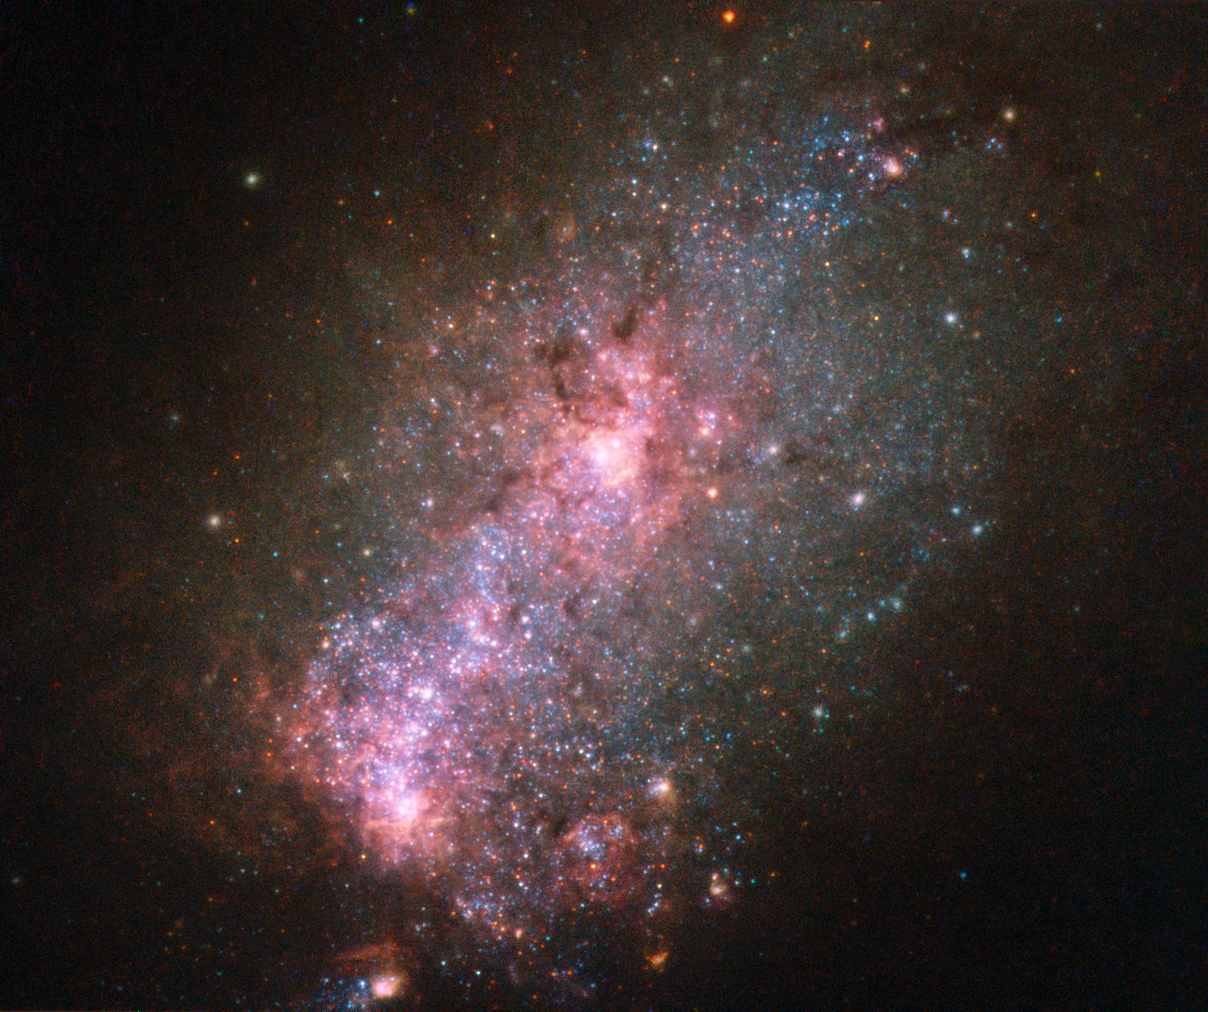

A galaxy fit to burst

This NASA/ESA Hubble Space Telescope image reveals the vibrant core of the galaxy NGC 3125. Discovered by John Herschel in 1835, NGC 3125 is a great example of a starburst galaxy — a galaxy in which unusually high numbers of new stars are forming, springing to life within intensely hot clouds of gas.

Located approximately 50 million light-years away in the constellation of Antlia (The Air Pump), NGC 3125 is similar to, but unfathomably brighter and more energetic than, one of the Magellanic Clouds. Spanning 15 000 light-years, the galaxy displays massive and violent bursts of star formation, as shown by the hot, young, and blue stars scattered throughout the galaxy’s rose-tinted core. Some of these clumps of stars are notable — one of the most extreme Wolf–Rayet star clusters in the local Universe, NGC 3125-A1, resides within NGC 3125.

Despite their appearance, the fuzzy white blobs dotted around the edge of this galaxy are not stars, but globular clusters. Found within a galaxy’s halo, globular clusters are ancient collections of hundreds of thousands of stars. They orbit around galactic centres like satellites — the Milky Way, for example, hosts over 150 of them.

Credit: ESA/Hubble & NASA Acknowledgement: Judy Schmidt (Geckzilla)